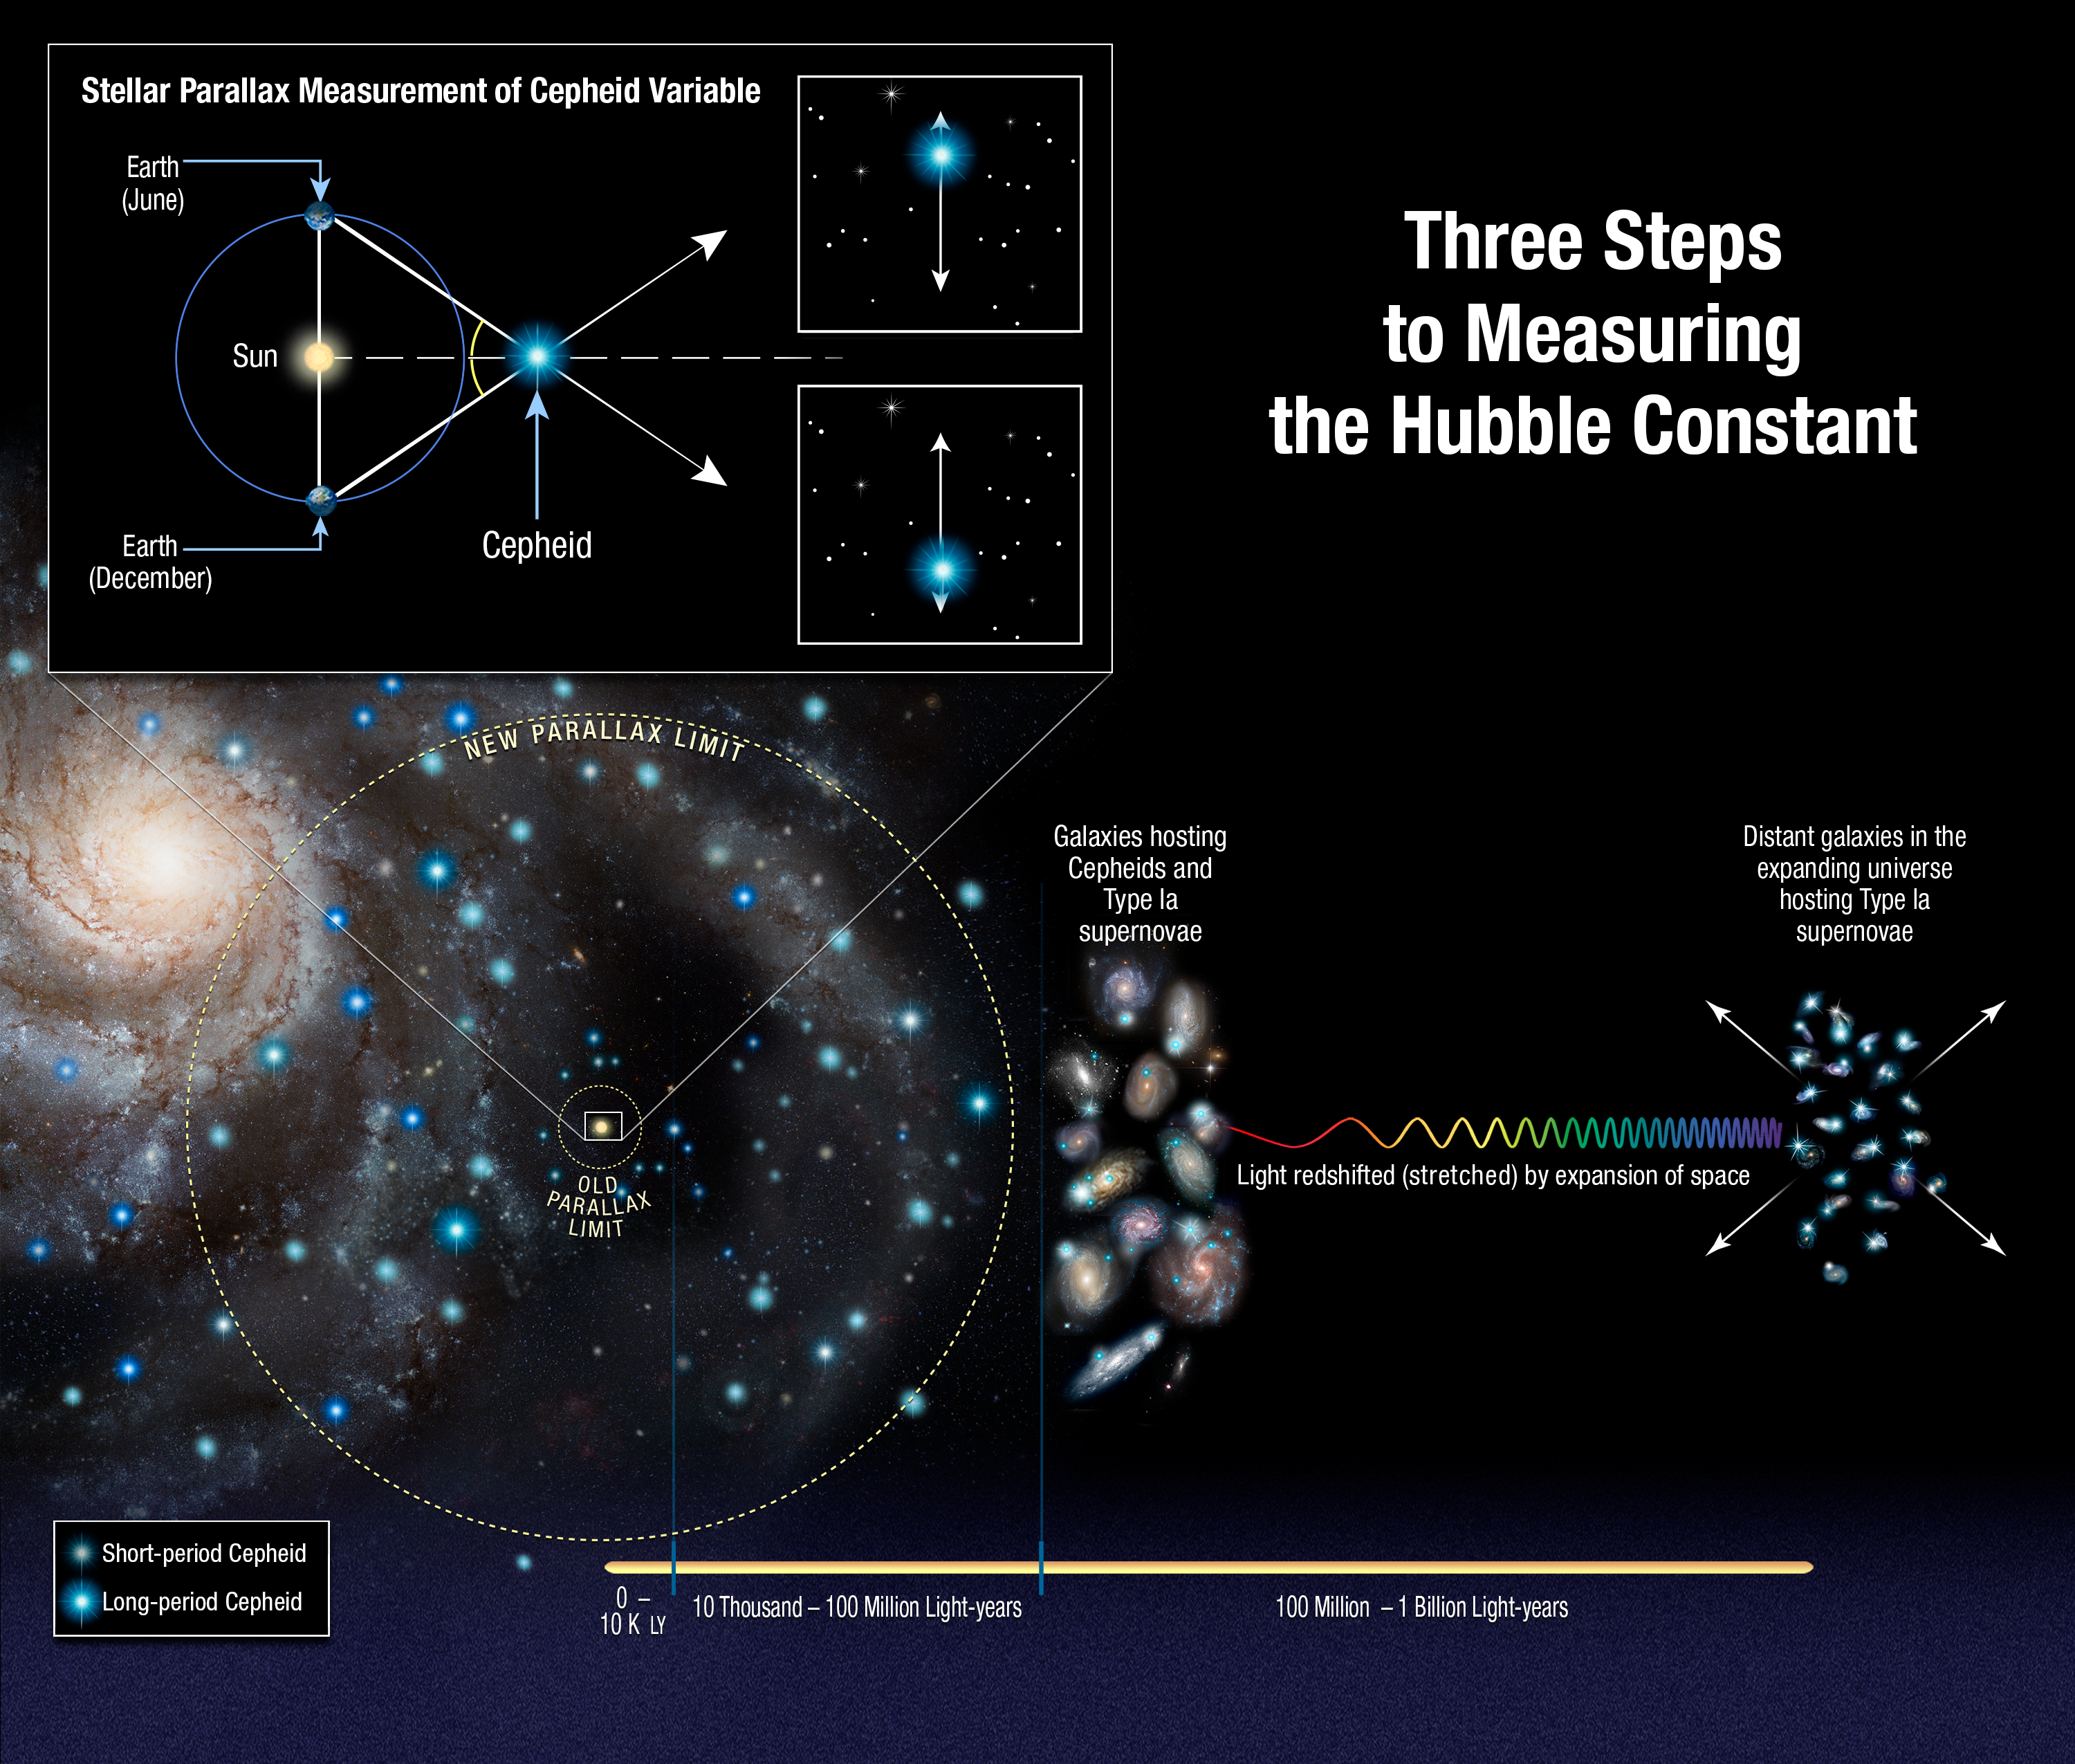

Three steps to the Hubble constant

This illustration shows the three steps astronomers used to measure the expansion rate of the Universe to an unprecedented accuracy, reducing the total uncertainty to 2.3 %. Astronomers made the measurements by streamlining and strengthening the construction of the cosmic distance ladder, which is used to measure accurate distances to galaxies near to and far from Earth.

Beginning at left, astronomers use the NASA/ESA Hubble Space Telescope to measure the distances to a class of pulsating stars called Cepheid variables, employing a basic tool of geometry called parallax. Parallax is the apparent shift of an object's position due to a change in an observer's point of view. The box at top left shows how astronomers used Hubble to measure the parallax to Cepheid variables. The Hubble astronomers had to gauge the apparent tiny wobble of the Cepheids due to Earth’s motion around the Sun. These wobbles are roughly the apparent size of a grain of sand seen 160 kilometers away.

The latest Hubble result is based on measurements of the parallax of eight newly analysed Cepheids in our Milky Way galaxy. These stars are about 10 times farther away than any studied previously, residing between 6000 and 12 000 light-years from Earth and are just like the ones Hubble can see in other galaxies. Once astronomers calibrate the Cepheids' true brightness, they can use them as cosmic yardsticks to measure distances to galaxies much farther away than they can with the parallax technique. The rate at which Cepheids pulsate provides an additional fine-tuning to the true brightness, with slower pulses for more luminous Cepheids. The astronomers compare the calibrated luminosity values with the stars' apparent brightness, as seen from Earth, to determine accurate distances.

Once the Cepheids are calibrated, astronomers move beyond our Milky Way to nearby galaxies (shown at centre). They look for Cepheid stars in galaxies that recently hosted another reliable yardstick: Type Ia supernovae, exploding stars that flare with the same amount of brightness. The astronomers use the Cepheids to measure the luminosity of the supernovae in each host galaxy.

They then look for supernovae in galaxies located even farther away from Earth. Unlike Cepheids, Type Ia supernovae are brilliant enough to be seen from relatively longer distances. The astronomers compare the luminosity and apparent brightness of distant supernovae to measure out to the distance where the expansion of the Universe can be seen. They compare those distance measurements with how the light from the supernovae is stretched to longer wavelengths by the expansion of space. They use these two values to calculate how fast the Universe is expanding now, a number called the Hubble constant.

Credit: NASA, ESA, A. Feild (STScI), and A. Riess (STScI/JHU)